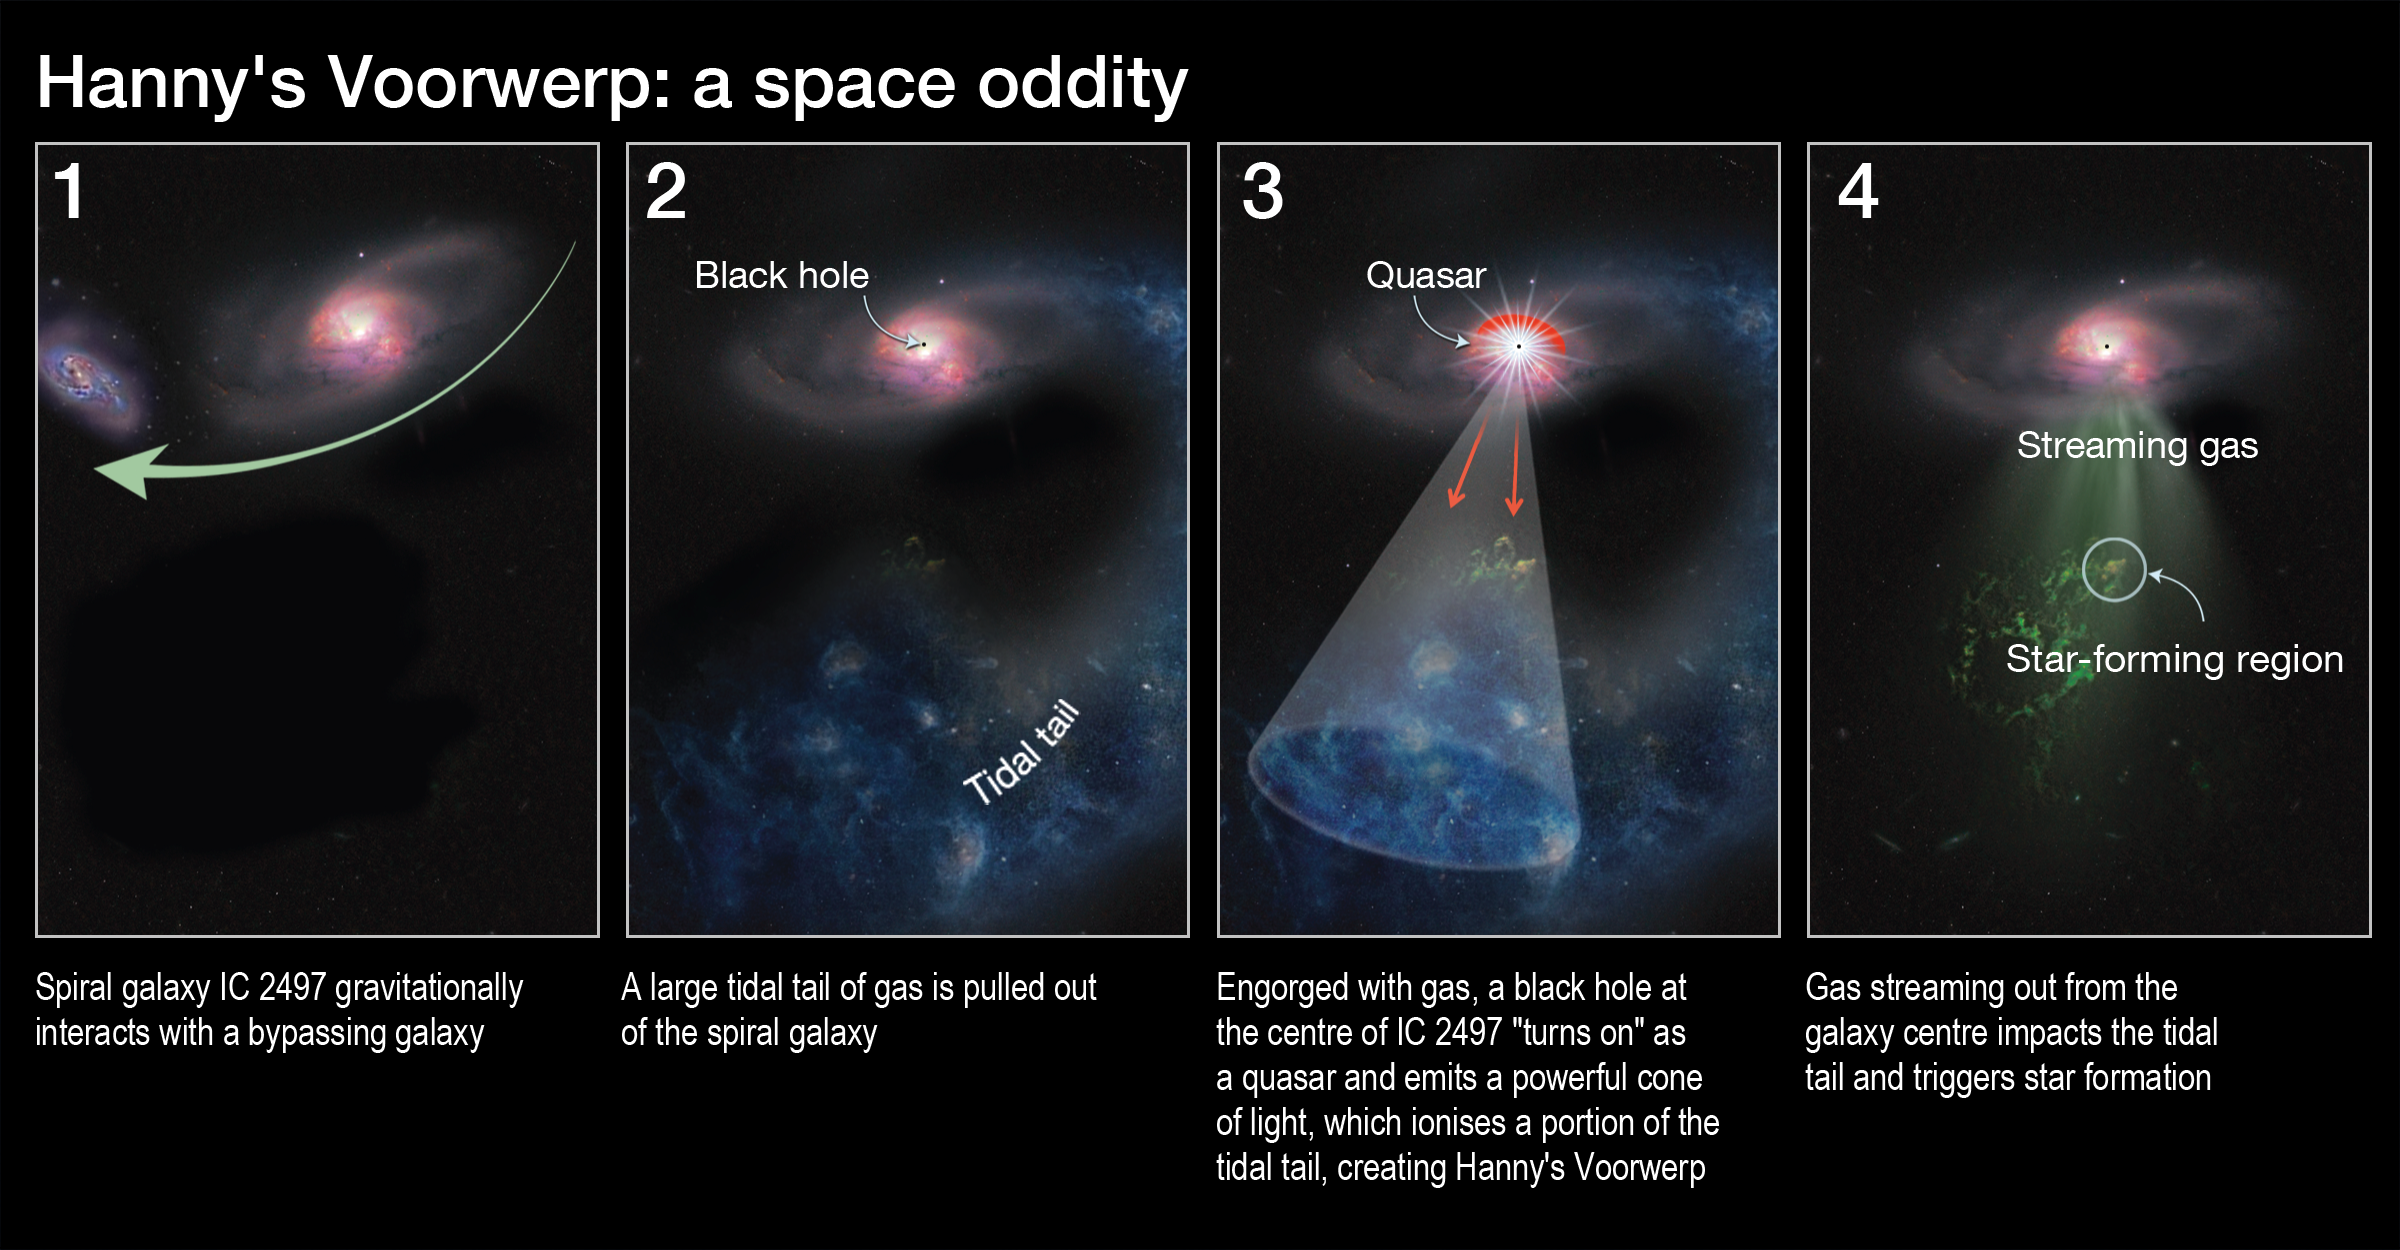

Hanny’s Voorwerp: A space oddity

This diagram explains the formation of the strange green object known as Hanny’s Voorwerp. Astronomers believe that it is part of the long streamer of gas that extends from galaxy IC 2497, lit up brightly by the searchlight beam of a recently extinguished quasar.

Credit: NASA, ESA